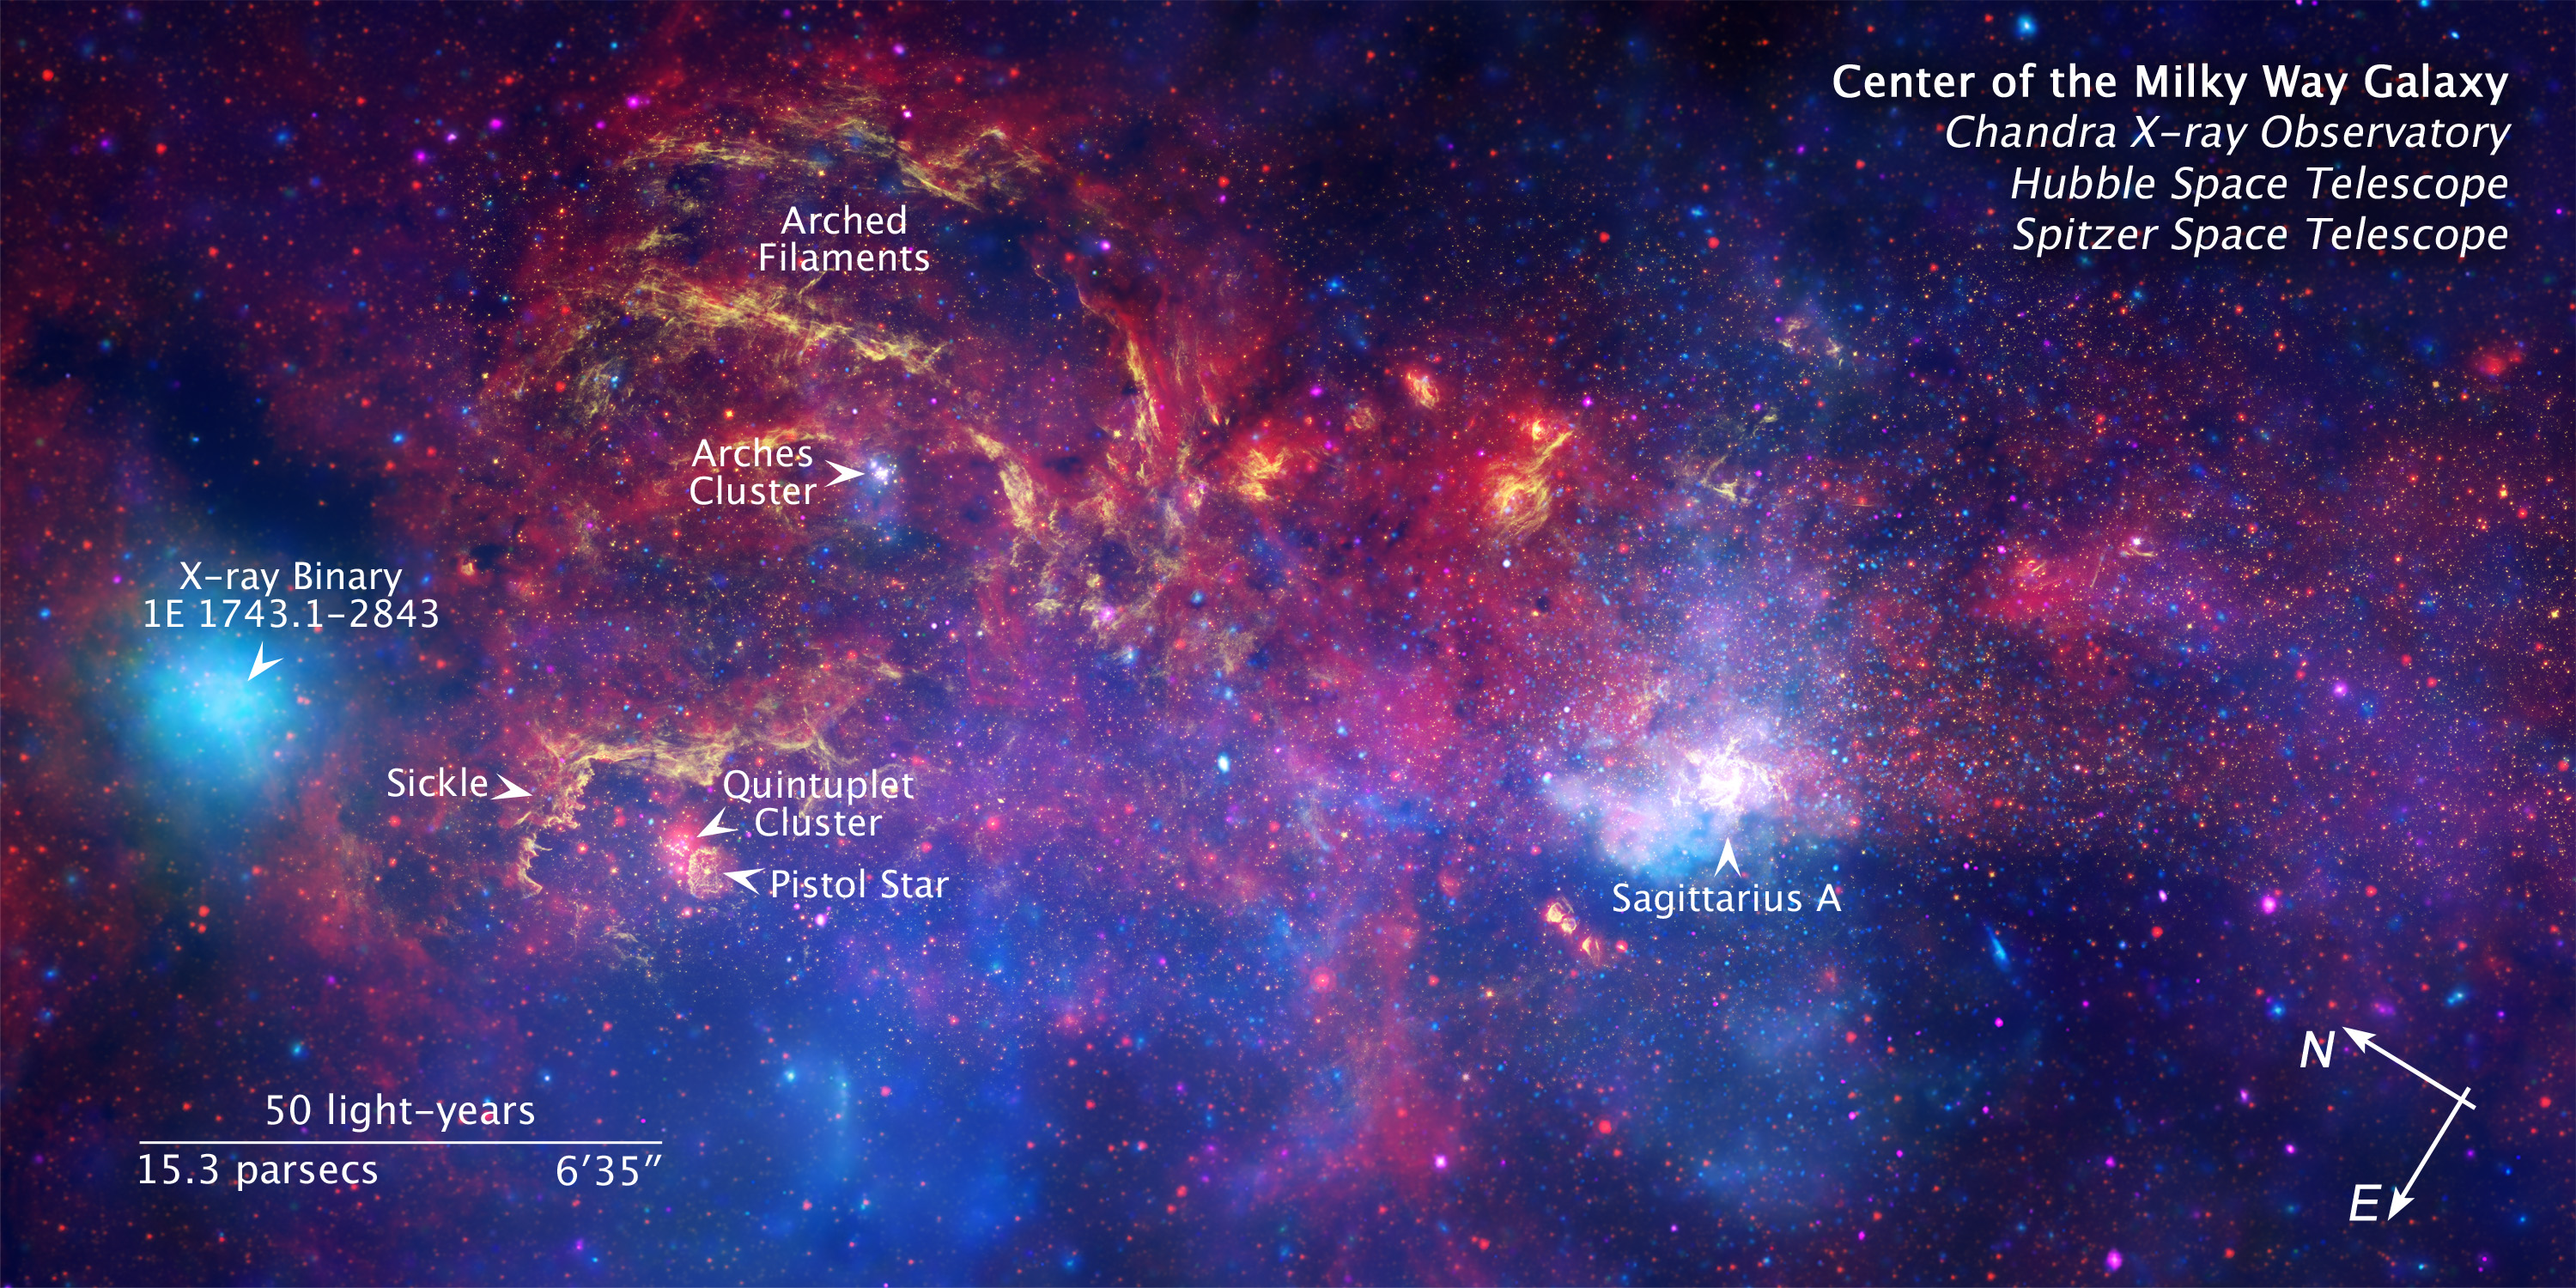

Compass/Scale annotated image of the centre of the Milky Way

A never-before-seen view of the turbulent heart of our Milky Way galaxy, courtesy of Hubble, Spitzer and Chandra.

Credit: NASA, ESA, SSC, CXC and STScI